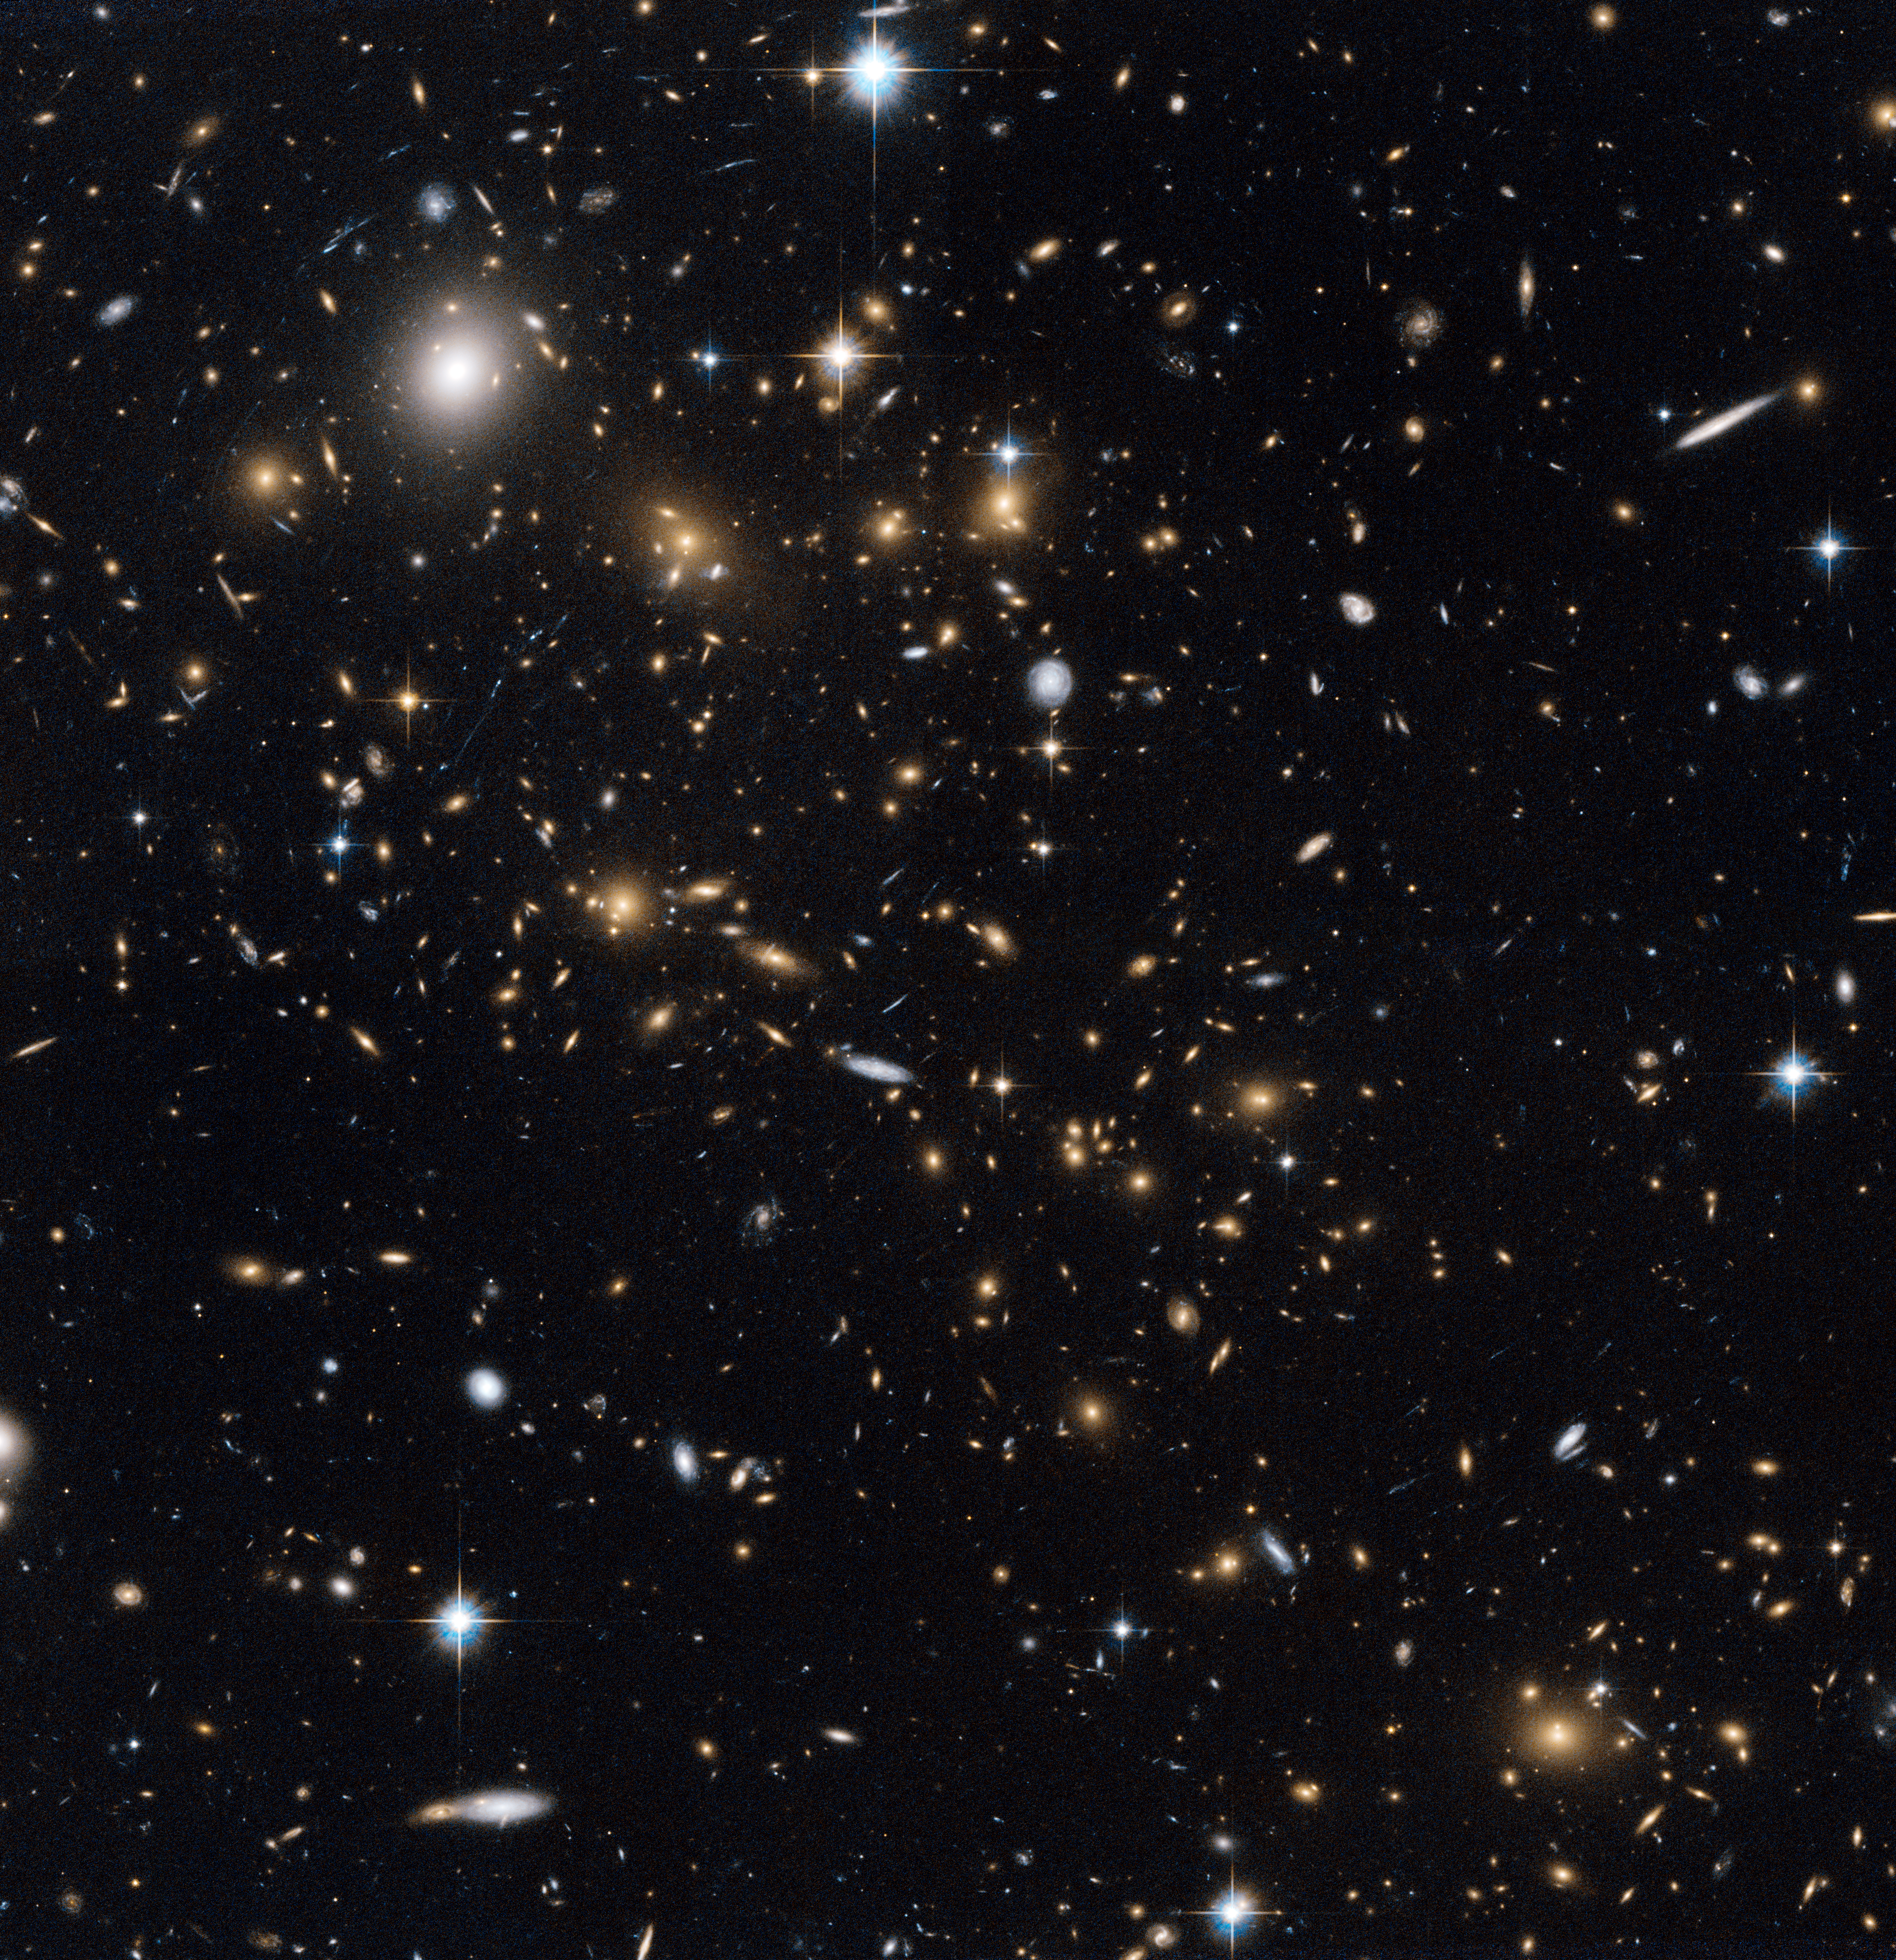

A snowstorm of distant galaxies

At first glance, the scatter of pale dots on this NASA/ESA Hubble Space Telescope image looks like a snowstorm in the night sky. But almost every one of these delicate snowflakes is a distant galaxy in the cluster MACS J0717.5+3745 and each is home to billions of stars. This apparently placid scene also hides a storm of epic scale. This picture shows a region where three galaxy clusters are merging and releasing enormous amounts of energy in the form of X-rays. These distant objects are around 5.4 billion light-years from Earth, and were imaged during the Massive Cluster Survey, a project to study distant clusters of galaxies using Hubble.

The amount of mass in this sea of galaxies is huge, and is great enough to visibly bend the fabric of spacetime. The strange distortion in the shapes of many of the galaxies in this picture, which appear stretched and bent as if they were looked at through a glass bottle, is a result of gravitational lensing, where the gravitational fields around massive objects bend light around them.

Predicted by Einstein in his famous general theory of relativity, gravity’s ability to distort light was first demonstrated in 1919 in a well-known experiment carried out by Sir Arthur Eddington, who led an expedition to the island of Principe, off the coast of Africa, to measure the apparent shift of a star when observed close to the edge of the Sun’s disc during a solar eclipse.

This picture was created from images taken through near-infrared (F814W) and yellow (F555W) filters using the Wide Field Channel of Hubble’s Advanced Camera for Surveys. The exposure times were about 67 minutes and 33 minutes respectively and the field of view of the image is about 3 arcminutes across.

Credit: ESA/Hubble, NASA and H. Ebeling.